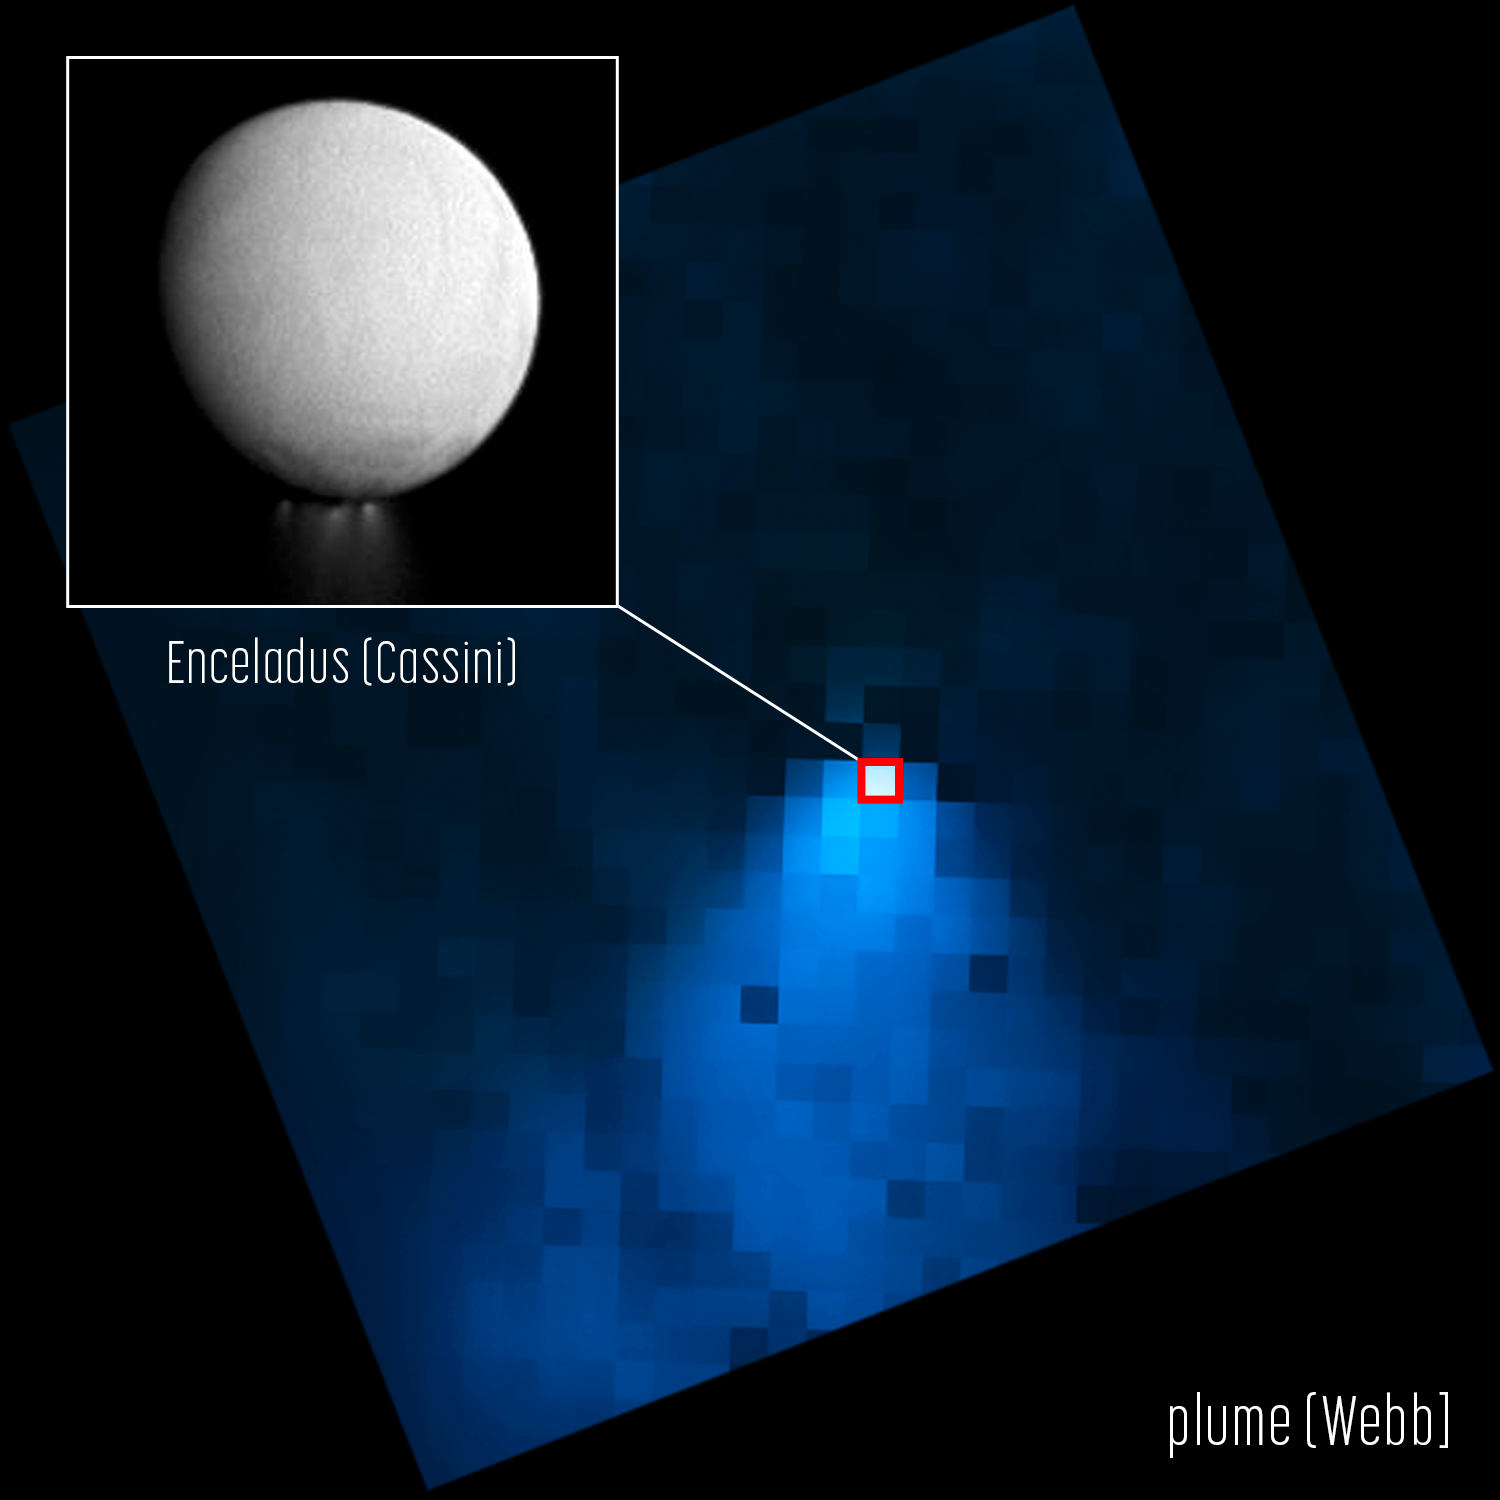

Enceladus (NIRCam Image)

Images from the NASA/ESA/CSA James Webb Space Telescope’s NIRCam (Near-Infrared Camera) show a water vapour plume jetting from the south pole of Saturn’s moon Enceladus, extending out 40 times the size of the moon itself. The inset, an image from the Cassini orbiter, emphasises how small Enceladus appears in the Webb image compared to the water plume.

Webb is allowing researchers, for the first time, to see directly how this plume feeds the water supply for the entire system of Saturn and its rings. By analysing the Webb data, astronomers have determined roughly 30 percent of the water stays within a torus, a fuzzy doughnut of water that is co-located with Saturn’s E-ring, and the other 70 percent escapes to supply the rest of the Saturnian system with water.

Enceladus, an ocean world about four percent the size of Earth at just 505 kilometres across, is one of the most exciting scientific targets in our Solar System in the search for life beyond Earth. A global reservoir of salty water sits below the moon’s icy outer crust, and geyser-like volcanoes spew jets of ice particles, water vapour, and organic chemicals out of crevices in the moon’s surface informally called ‘tiger stripes’.

Webb’s NIRCam was built by a team at the University of Arizona and Lockheed Martin’s Advanced Technology Center.

Credit: NASA, ESA, CSA, STScI, G. Villanueva (NASA’s Goddard Space Flight Center), A. Pagan (STScI)